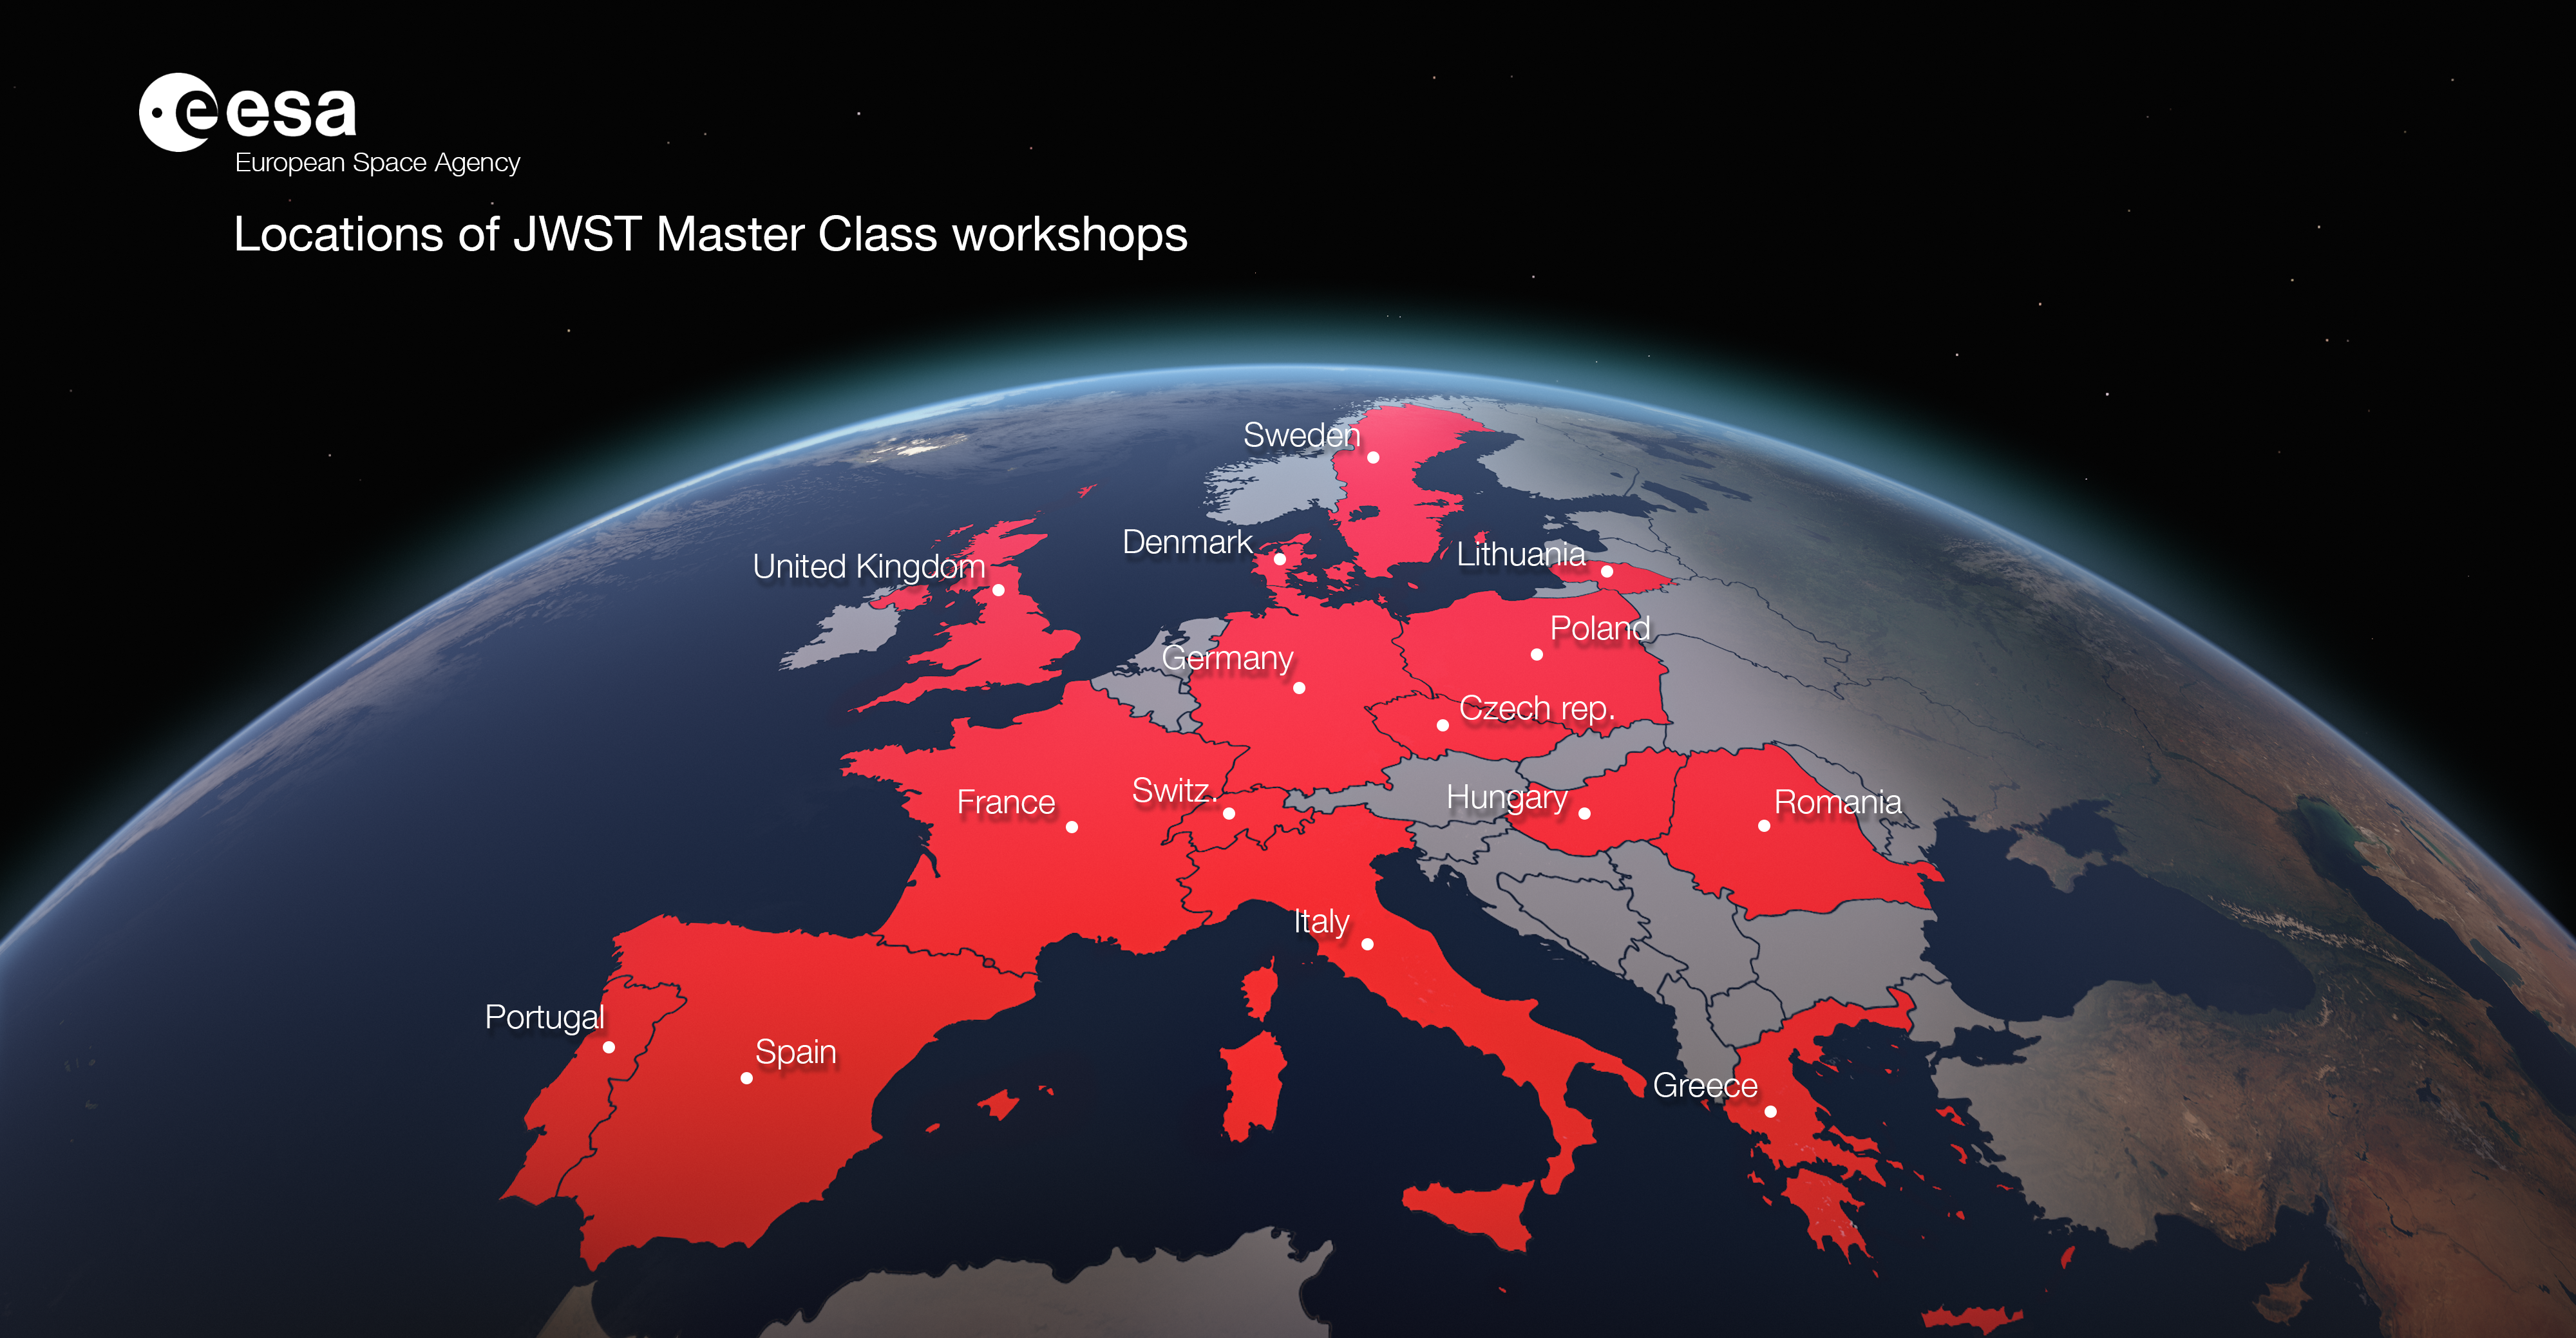

Locations of the JWST Master Class Workshops in 2020

Locations of the JWST Master Class Workshops in 2020.

Credit: ESA/Hubble, M. Kornmesser